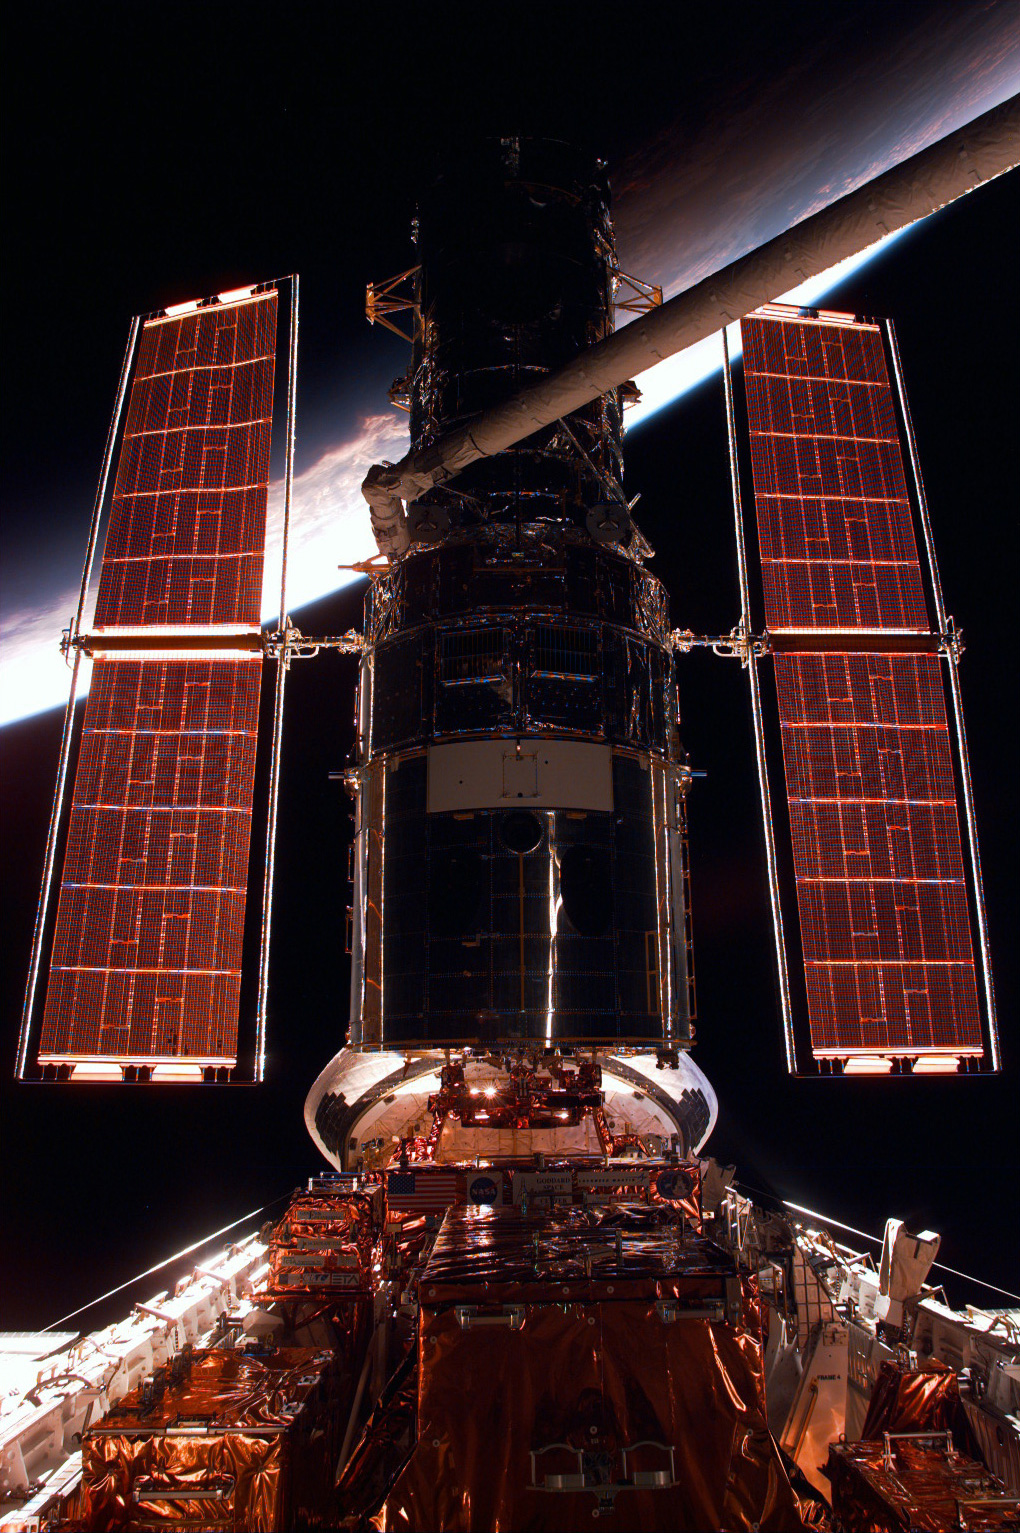

The Hubble Space Telescope

A close-up image of the Hubble Space Telescope (HST).

Credit: NASA/ESA